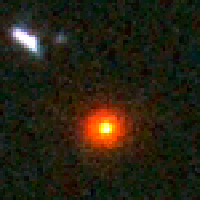

Distant Supernova 3 - Before Outburst

Supernovae are extremely luminous and cause a burst of radiation that often briefly outshines an entire galaxy, before fading from view over several weeks or months. During this short interval a supernova can radiate as much energy as the Sun is expected to emit over its entire life span.

Credit: NASA/ESA and A. Riess (STScI)